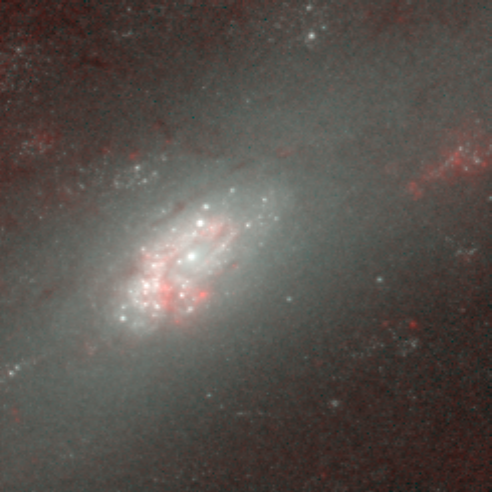

Hubble's Infrared Galaxy Gallery. A View of NGC 2903

Astronomers have used the NASA/ESA Hubble Space Telescope to produce an infrared 'photo essay' of spiral galaxies. By penetrating the dust clouds swirling around the centers of these galaxies, the telescope’s infrared vision is offering fresh views of star birth.

Credit: Torsten Boeker, Space Telescope Science Institute, and NASA/ESA